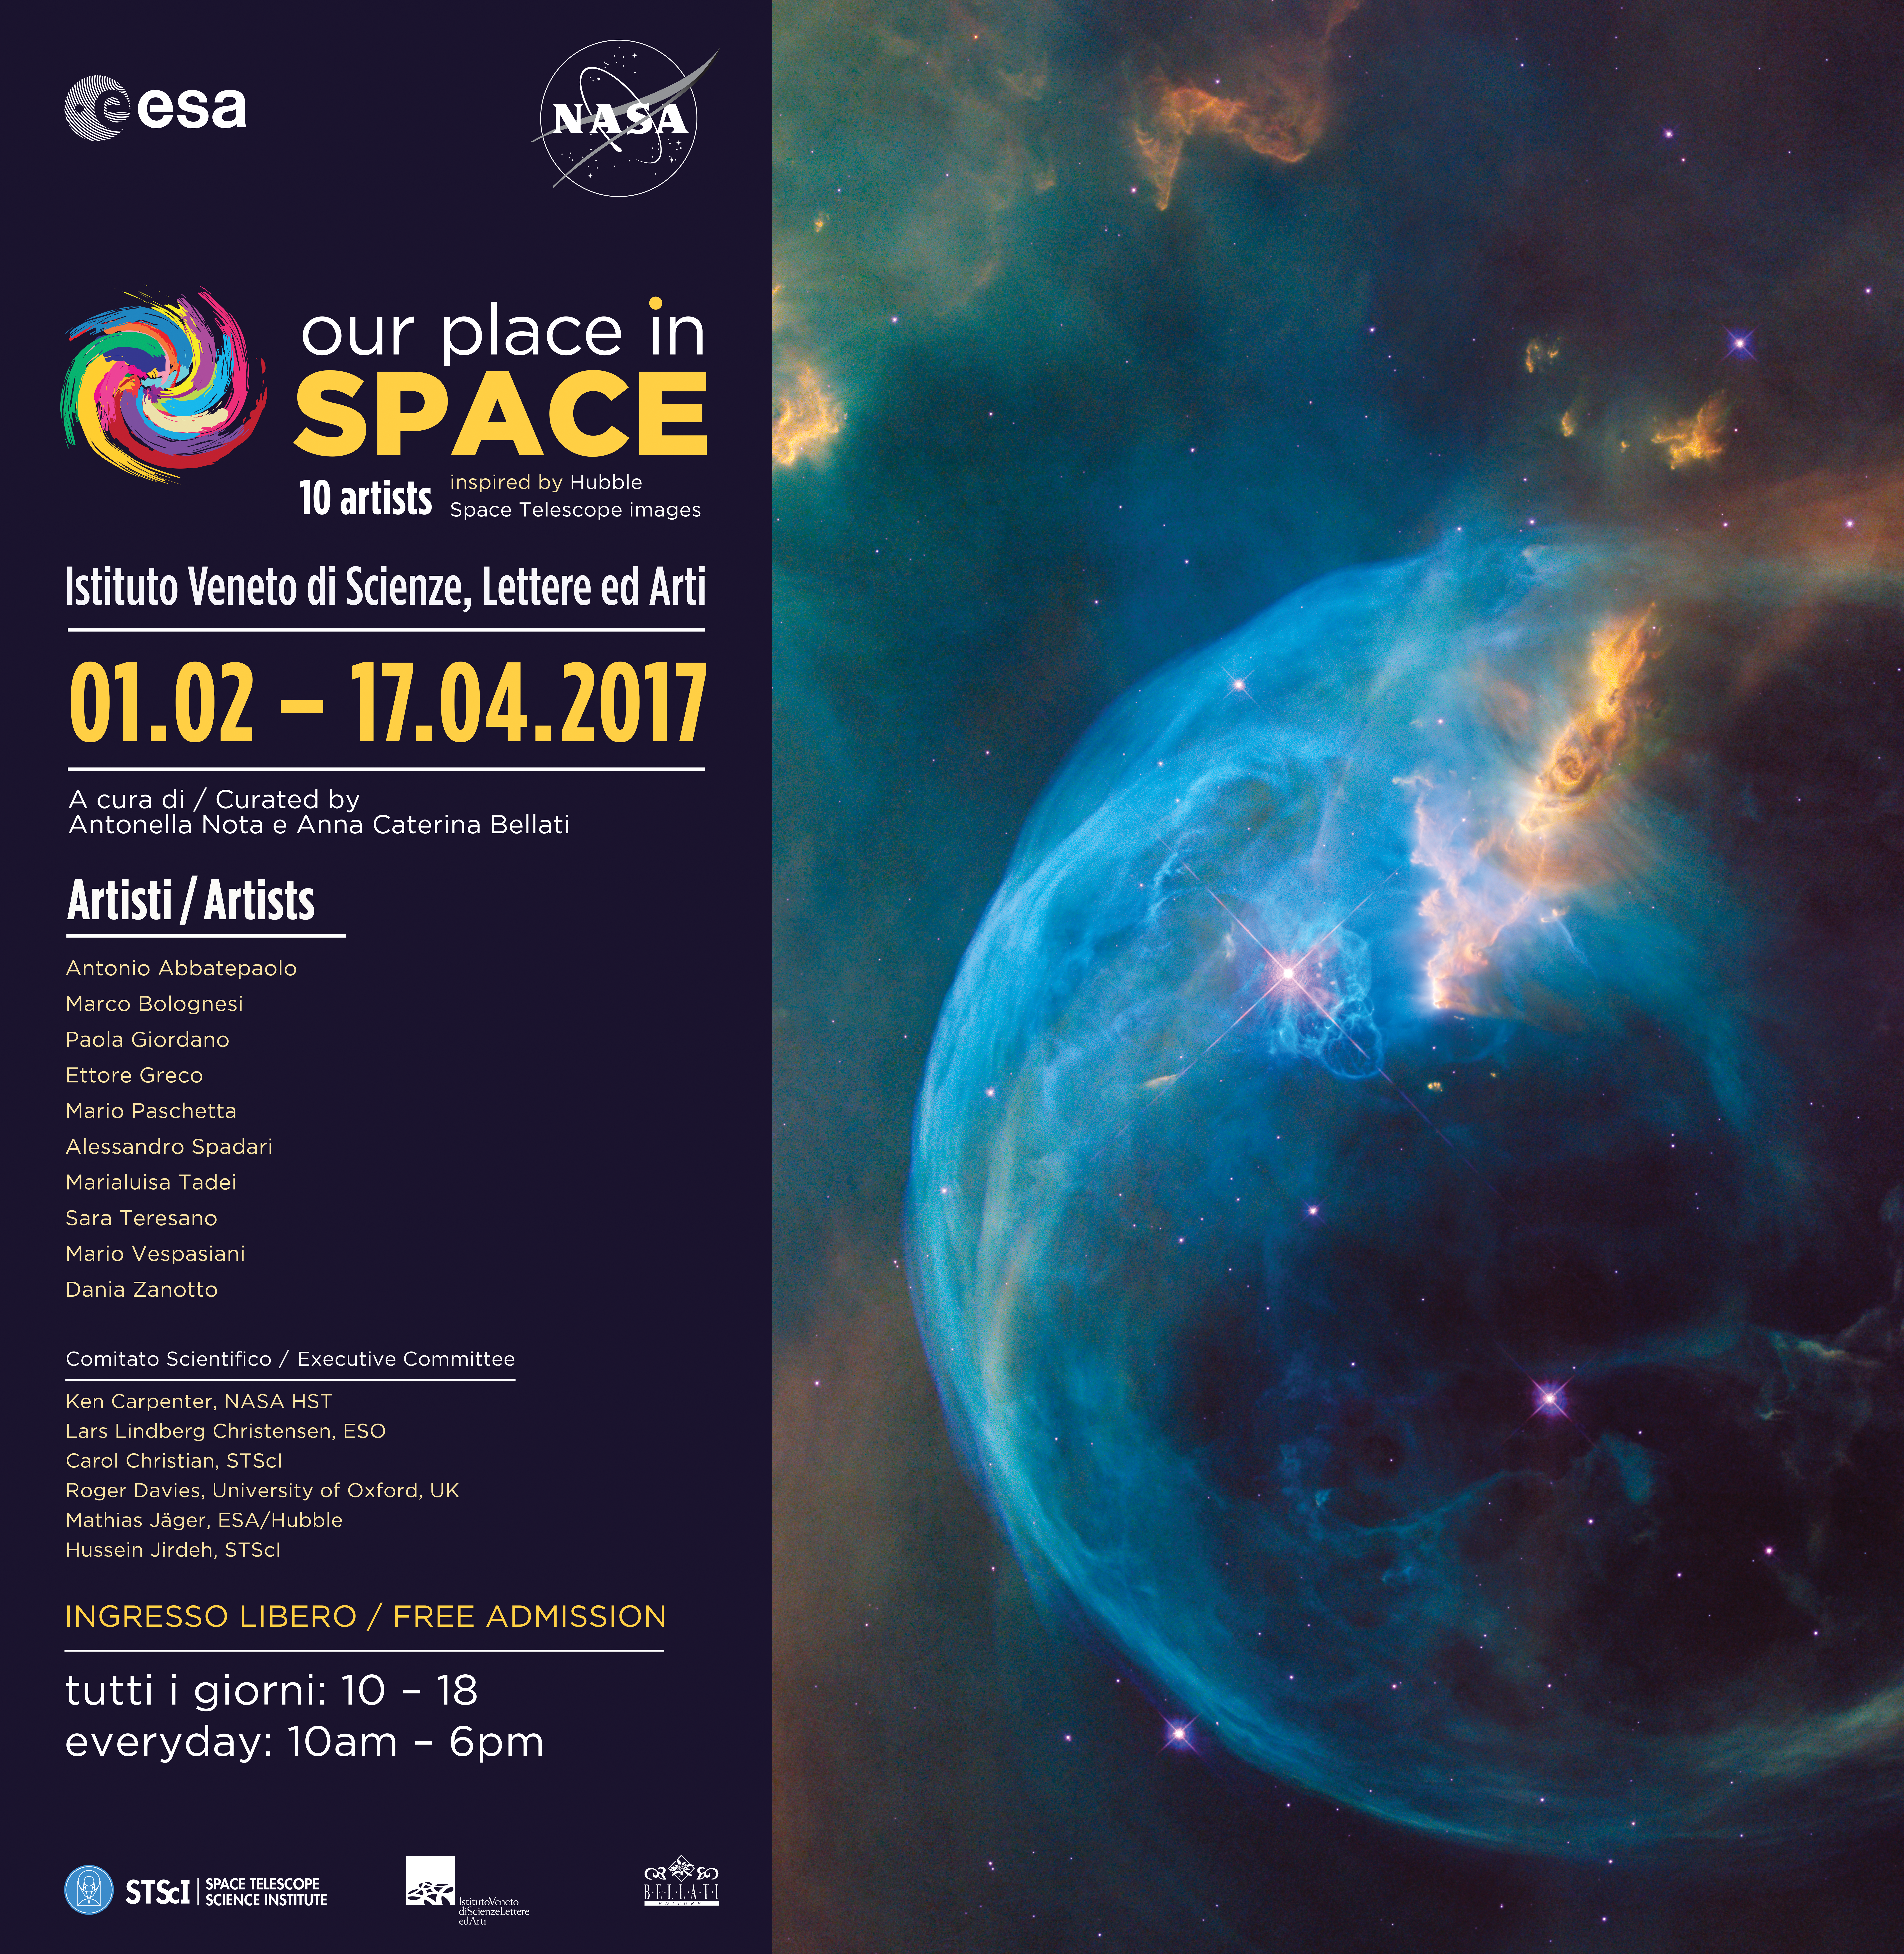

Our Place in Space Banner

This is the official poster for the travelling exhibition Our Place in Space, to be displayed at the Istituto Veneto di Scienze, Lettere ed Arti, Palazzo Cavalli Franchetti in Venice, Italy. The exhibition is on display from 1 February to 17 April 2017.

Credit: ESA/Hubble, NASA, Pam Jeffries